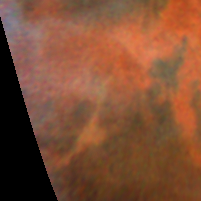

Decay of a Martian dust storm

The dust appears to be confined to the canyons, which can be as much as 8 km deep and hundreds of km wide.

Credit: Steve Lee (Univ. Colorado), Phil James (Univ. Toledo), and Mike Wolff (Univ. Toledo), and NASA/ESA